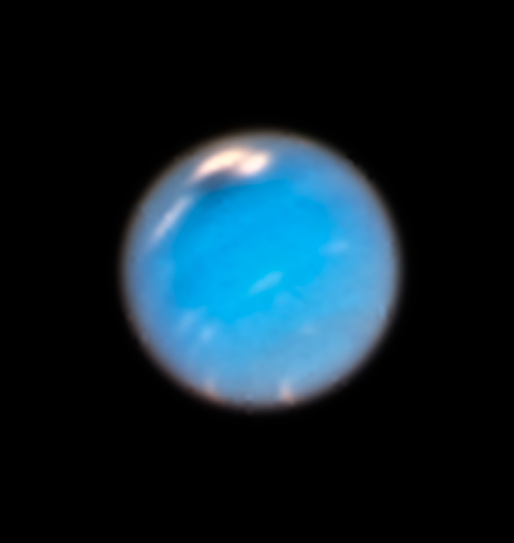

A storm is coming

Since Pluto’s status-change from fully-fledged planet to dwarf planet, Neptune holds the title of outermost planet in the Solar System. This new image of the planet was made during Hubble’s Outer Planet Atmosphere Legacy (OPAL) programme, under which it has observed the four outermost planets, including Neptune, on a yearly basis since 2014.

The observations of Neptune carried out in September and November 2018 show the first evidence of a huge storm brewing, with the discovery of a new northern Great Dark Spot (visible here to the upper left of the planet’s disc, partially overlapping a large patch of white). This new dark storm is of a similar size and shape to the storm discovered in 1989 by the Voyager 2 space probe.

While the future evolution of the storm will be tracked through the continued yearly Hubble observations and also by ground-based telescopes, older OPAL observations from Hubble show that its appearance was preceded by increased cloud activity throughout the region. There are hints of the storm forming in images from as early as 2015. This slow origin process indicates that the storm developed deep within Neptune's atmosphere, pulling up dark material from its depths, and only became visible once the top of it reached higher altitudes.

Credit: NASA, ESA, A.A. Simon (NASA Goddard), and M.H. Wong and A.I. Hsu (University of California, Berkeley)